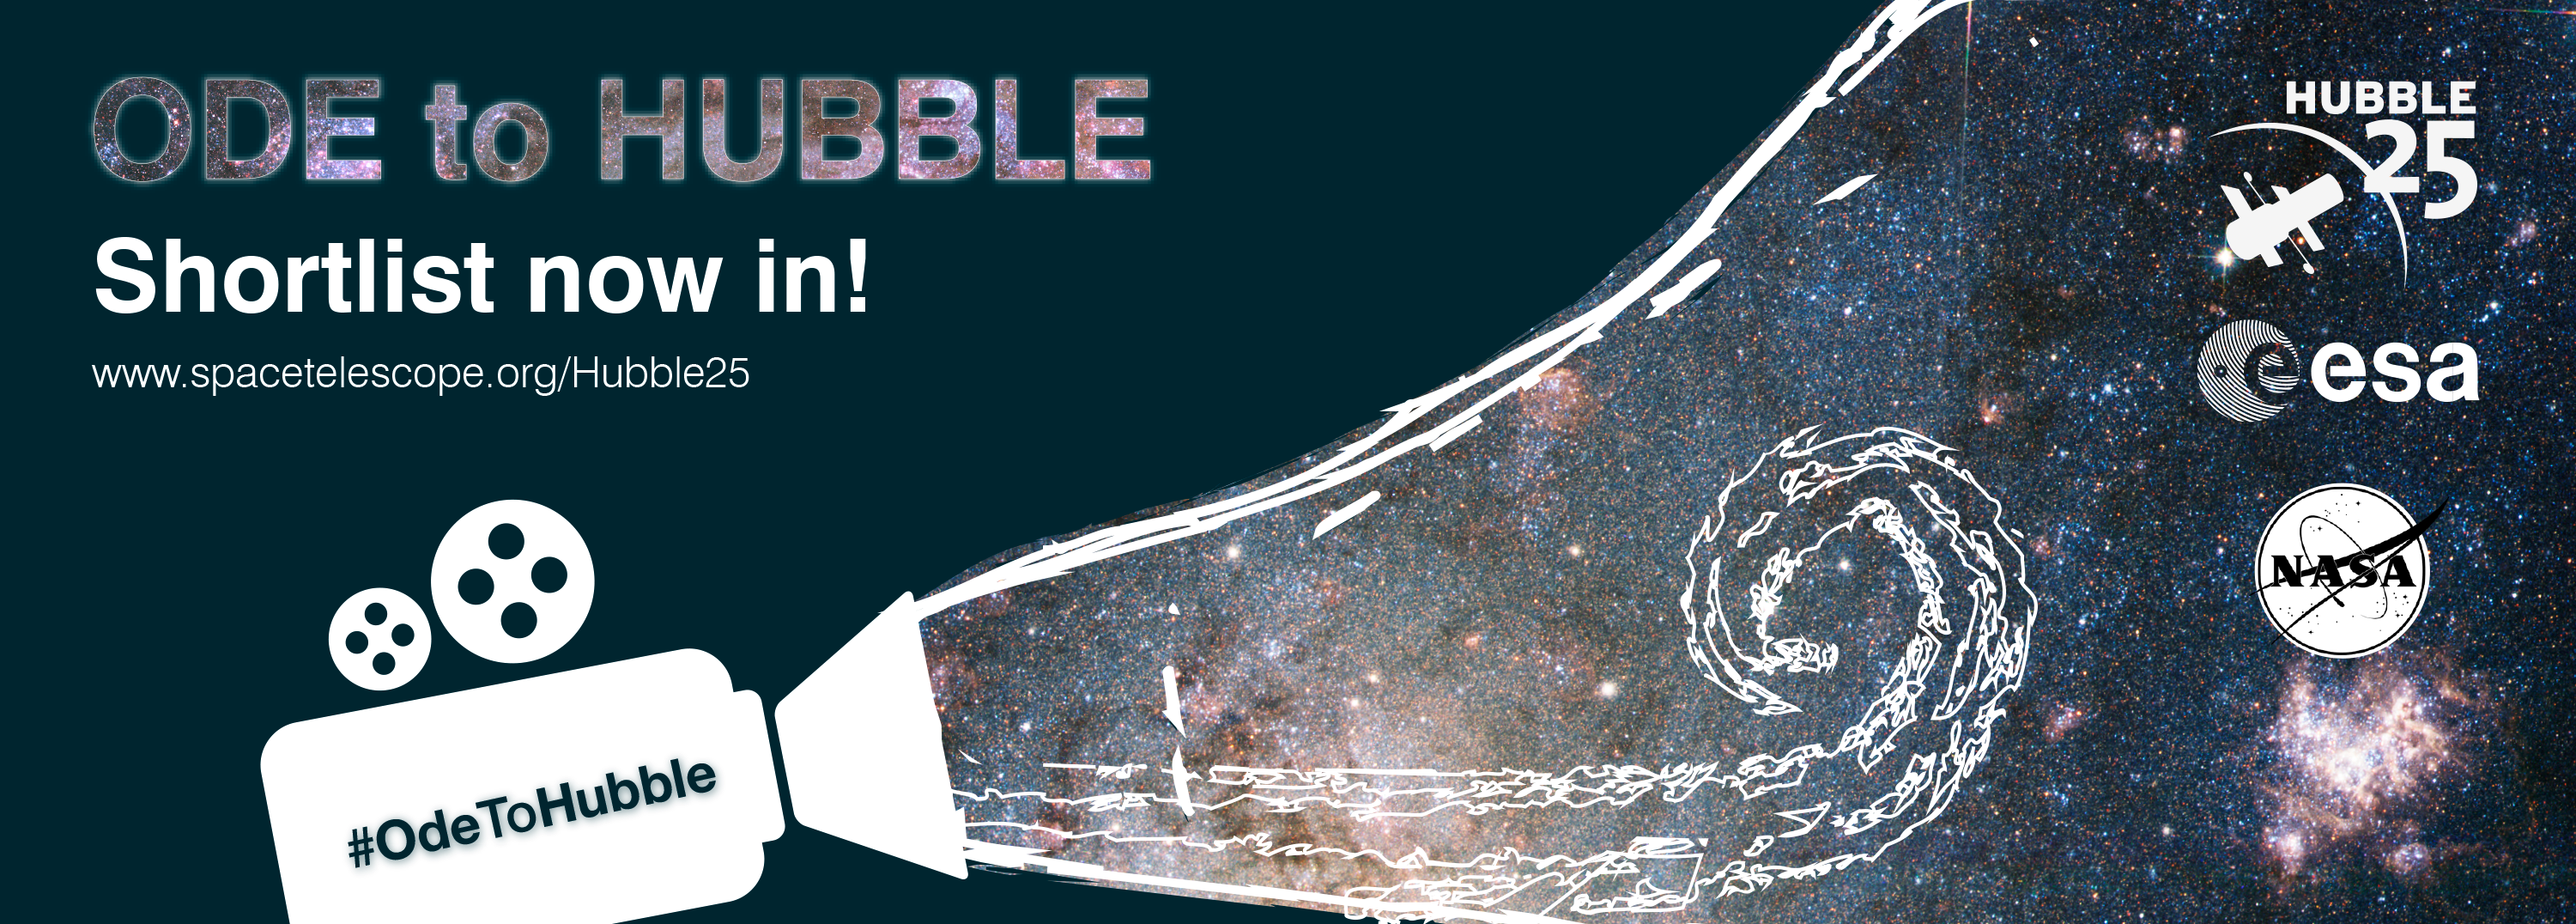

Ode to Hubble shortlist announced

A promotional banner for the Ode to Hubble competition. A video competition to celebrate Hubble's 25th year in orbit.

Credit: NASA & ESA